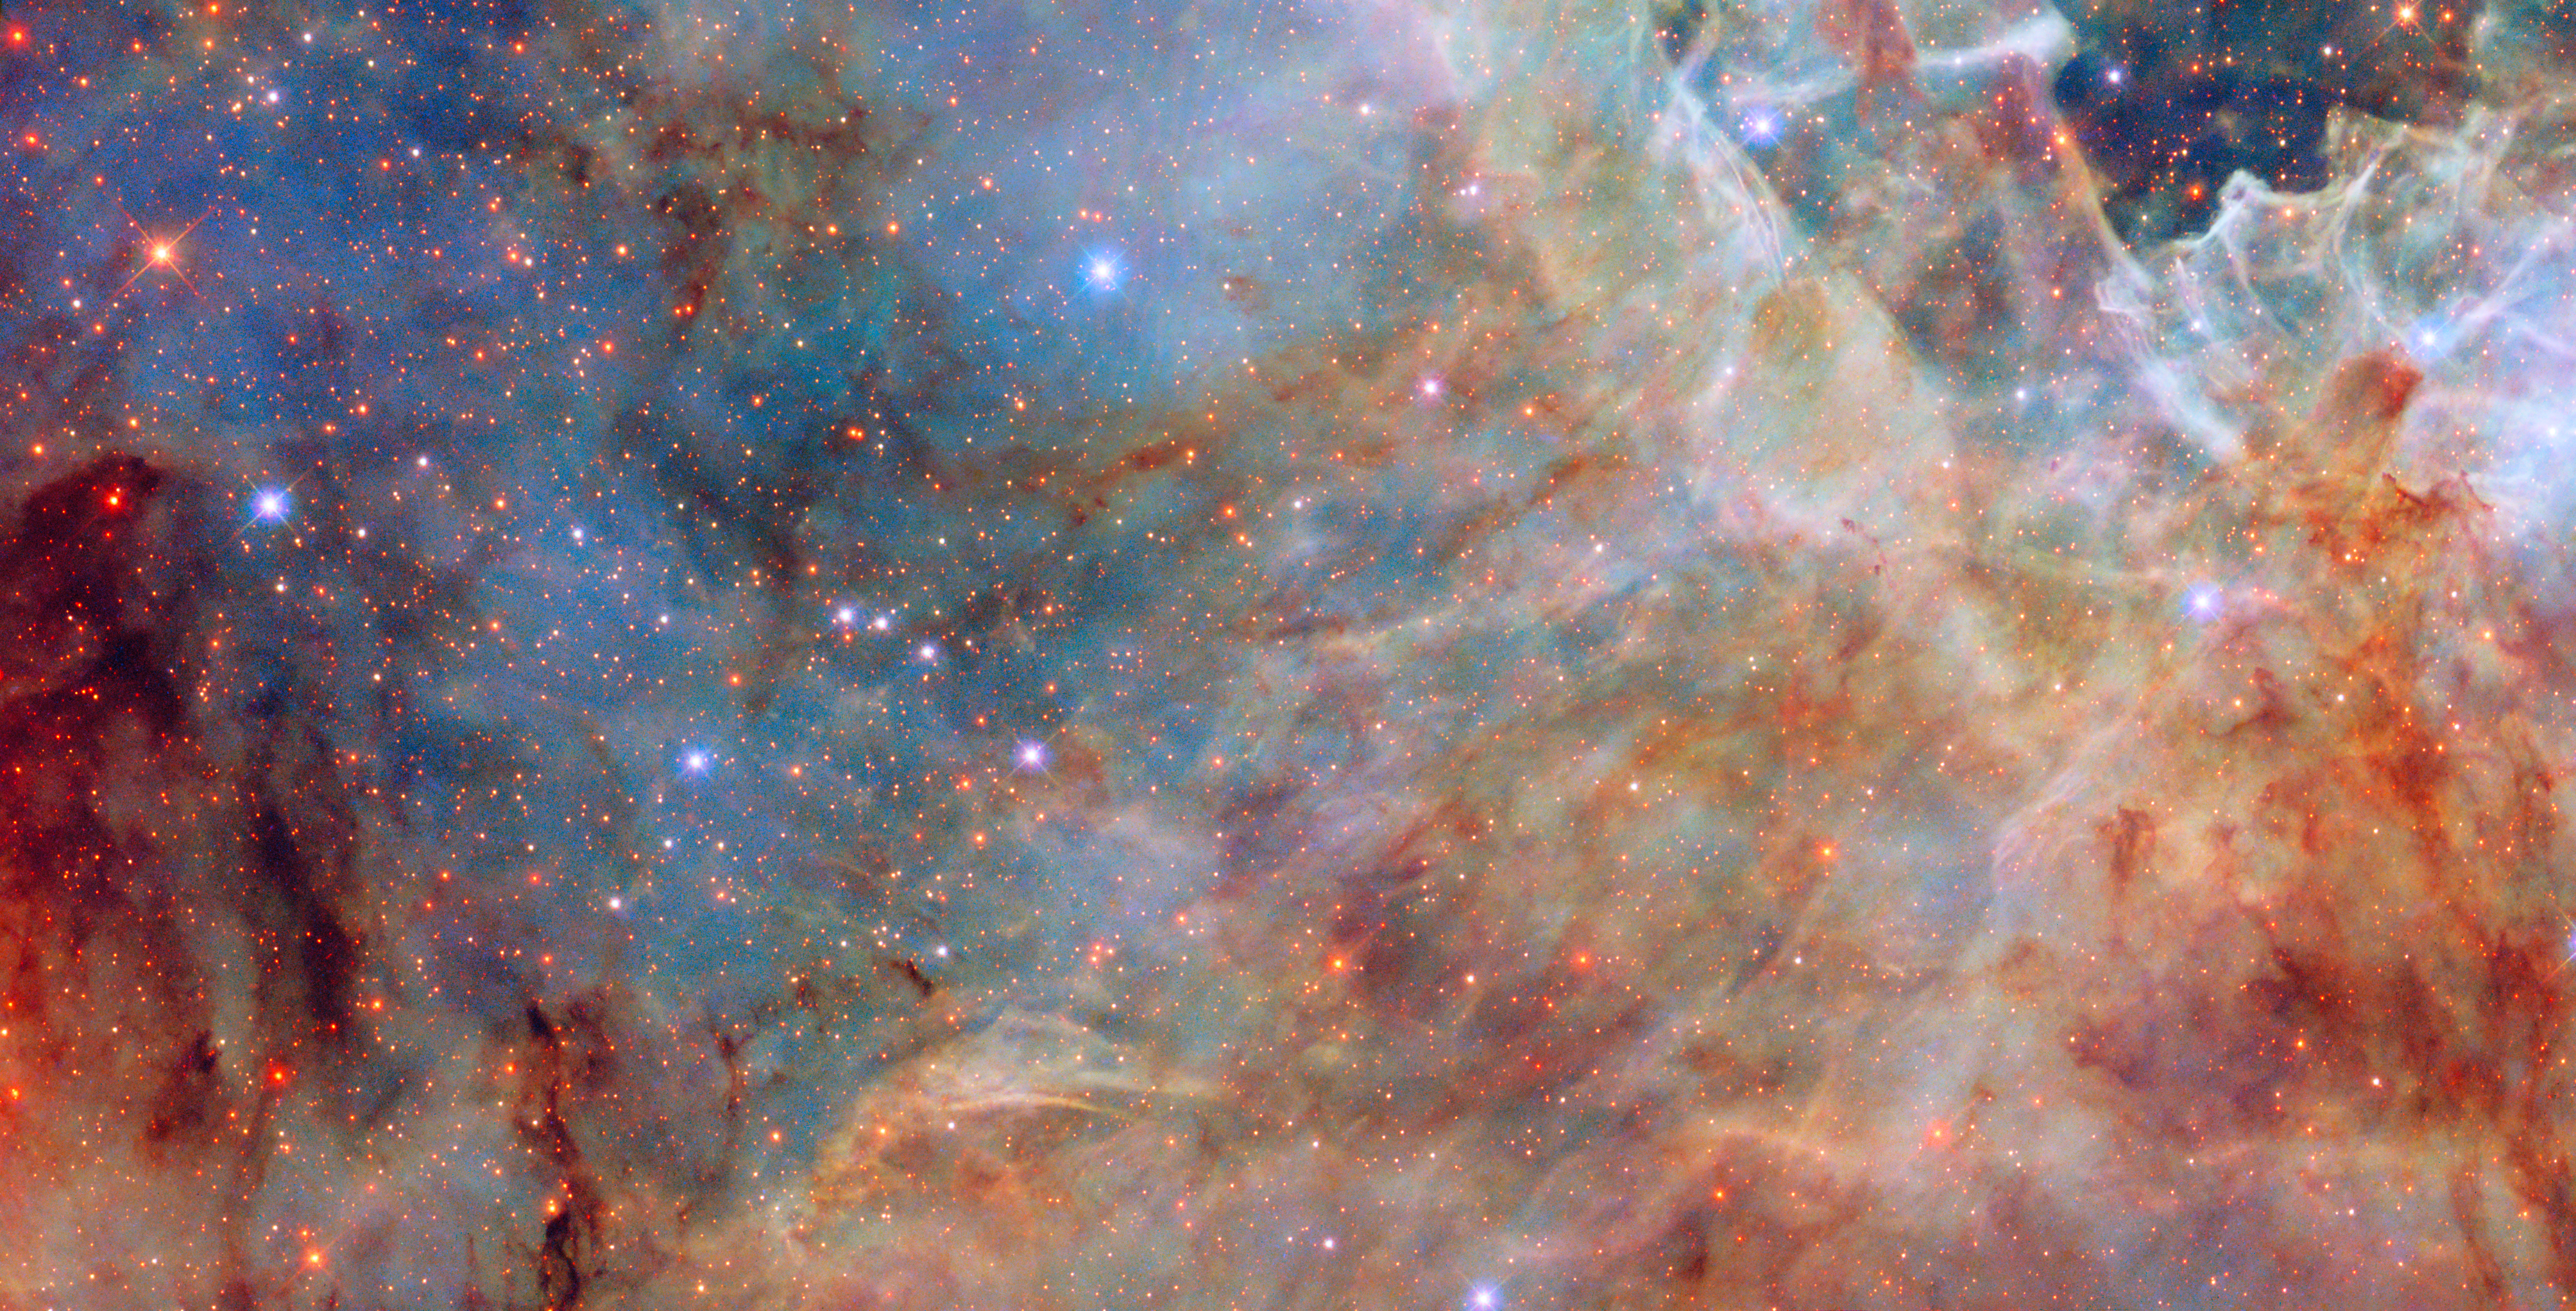

A Tarantula’s outskirts

Today’s NASA/ESA Hubble Space Telescope Picture of the Week features a dusty yet sparkling scene from one of the Milky Way’s satellite galaxies, the Large Magellanic Cloud. The Large Magellanic Cloud is a dwarf galaxy situated about 160 000 light-years away in the constellations Dorado and Mensa.

Despite being only 10–20% as massive as the Milky Way galaxy, the Large Magellanic Cloud contains some of the most impressive star-forming regions in the nearby Universe. The scene pictured here is on the outskirts of the Tarantula Nebula, the largest and most productive star-forming region in the local Universe. At its centre, the Tarantula Nebula hosts the most massive stars known, which weigh in at roughly 200 times the mass of the Sun.

The section of the nebula shown here features serene blue gas, brownish-orange dust patches and a sprinkling of multicoloured stars. The stars within and behind the dust clouds appear redder than those that are not obscured by the dust. Dust absorbs and scatters blue light more than red light, allowing more of the red light to reach our telescopes and making the stars appear redder than they are. This image incorporates ultraviolet and infrared light as well as visible light. Using Hubble observations of dusty nebulae in the Large Magellanic Cloud and other galaxies, researchers will study these distant dust grains, helping to understand the role that cosmic dust plays in the formation of new stars and planets.

Credit: ESA/Hubble & NASA, C. Murray